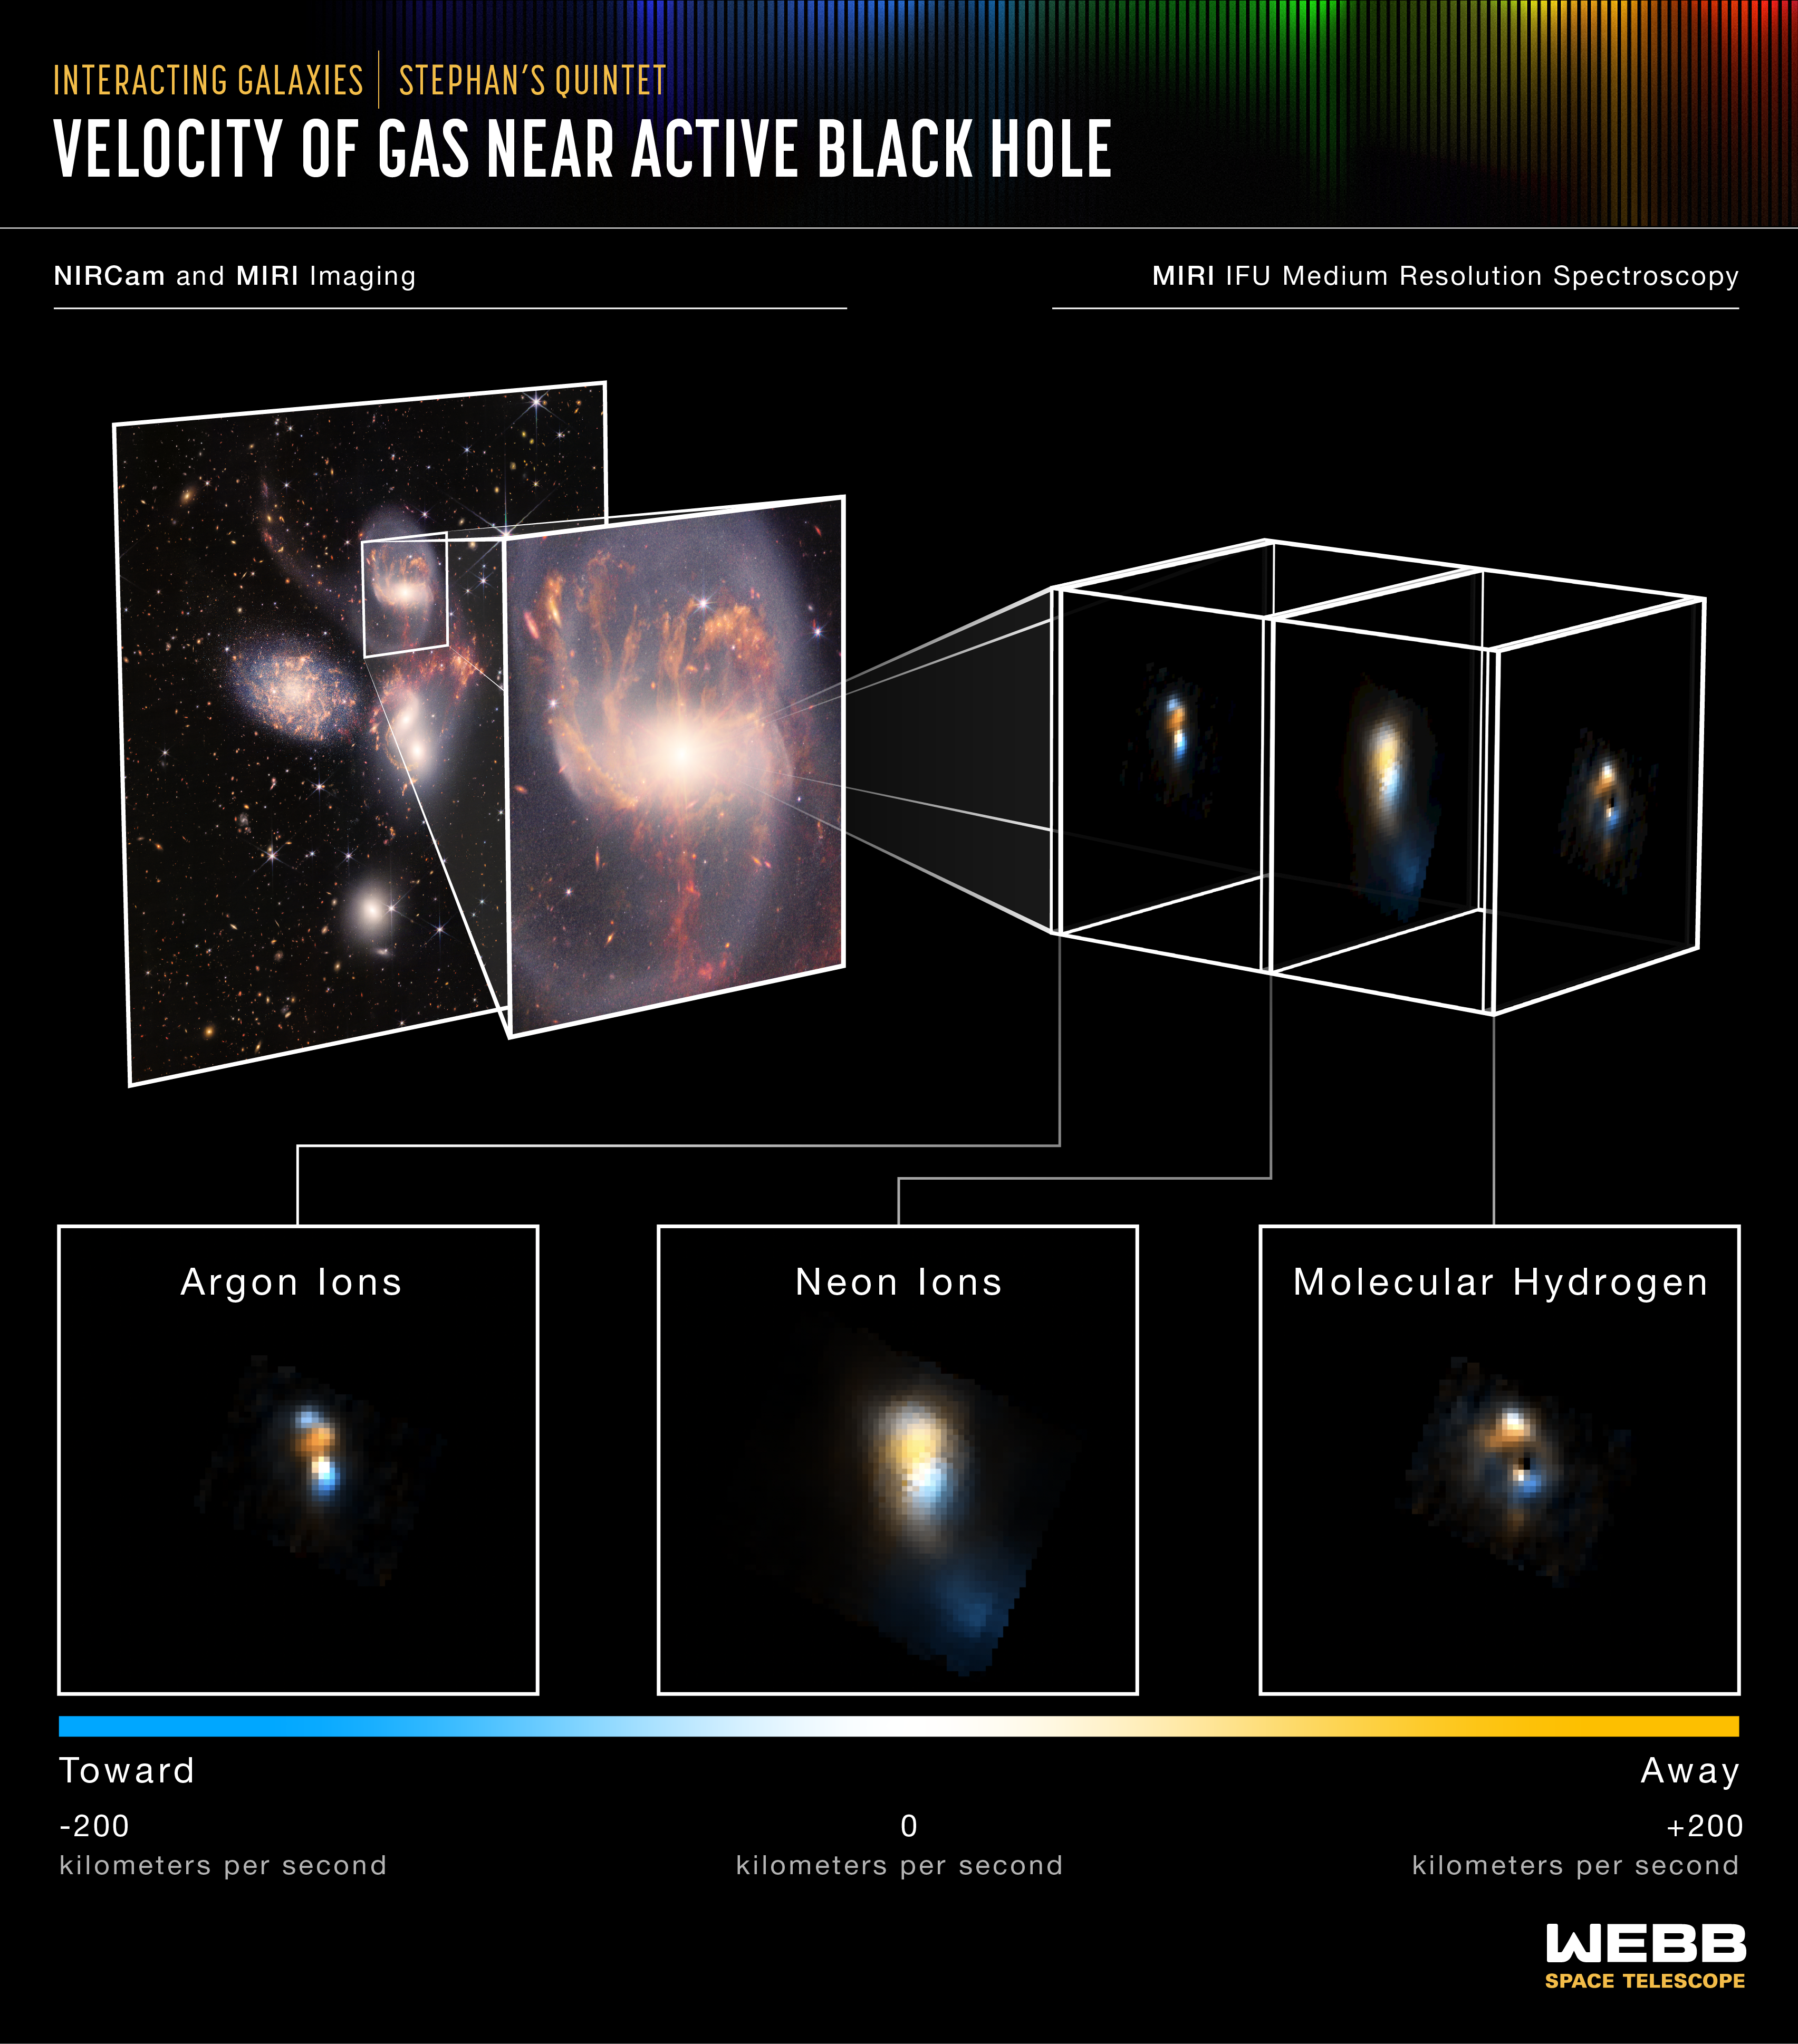

Velocity of Gas Near Active Black Hole

Stephan’s Quintet is a visual grouping of five galaxies located in the constellation Pegasus. Together, they are also known as the Hickson Compact Group 92 (HCG 92). Although called a “quintet,” only four of the galaxies are truly close together and caught up in a cosmic dance. The fifth and leftmost galaxy, called NGC 7320, is well in the foreground compared with the other four.

Tight groups like this may have been more common in the early universe when their superheated, infalling material may have fueled very energetic black holes called quasars. Even today, the topmost galaxy in the group – NGC 7319 – harbours an active galactic nucleus, a supermassive black hole 24 million times the mass of the Sun. It is actively accreting material and puts out light energy equivalent to 40 billion Suns.

Scientists using the NASA/ESA/CSA James Webb Space Telescope studied the active galactic nucleus in great detail with the Medium-Resolution Spectrometer (MRS), which is part of the Mid-Infrared Instrument (MIRI). The spectrometer features integral field units (IFUs) – a combination of a camera and spectrograph. These IFUs provided the Webb team with a “data cube,” or collection of images of the galactic core’s spectral features.

Using IFUs, scientists can measure spatial structures, determine the velocity of those structures, and get a full range of spectral data. Much like medical magnetic resonance imaging (MRI), the IFUs allow scientists to “slice and dice” the information into many images for detailed study.

MIRI’s MRS pierced through the shroud of dust near the active galactic nucleus to measure the bright emission from hot gas being ionised by powerful winds and radiation from the black hole. The instrument saw the gas near the supermassive black hole in wavelengths never studied before in so much detail, and it was able to determine its velocity.

Some of these key emission features are shown in this image. In each case, the blue-colored regions indicate movement toward the viewer and orange-colored regions represent movement away from the viewer. The argon and neon lines are from hot spots of superheated gas that is highly ionised by the powerful radiation and winds from the supermassive black hole. The molecular hydrogen line is from colder dense gas in the central regions of the galaxy and entrained in the outflowing wind. The velocities are measured by shifts in the wavelengths of a given emission line feature.

MIRI was contributed by ESA and NASA, with the instrument designed and built by a consortium of nationally funded European Institutes (The MIRI European Consortium) in partnership with JPL and the University of Arizona.

For a full array of Webb’s first images and spectra, including downloadable files, please visit: https://esawebb.org/initiatives/webbs-first-images/

Credit: NASA, ESA, CSA, and STScI